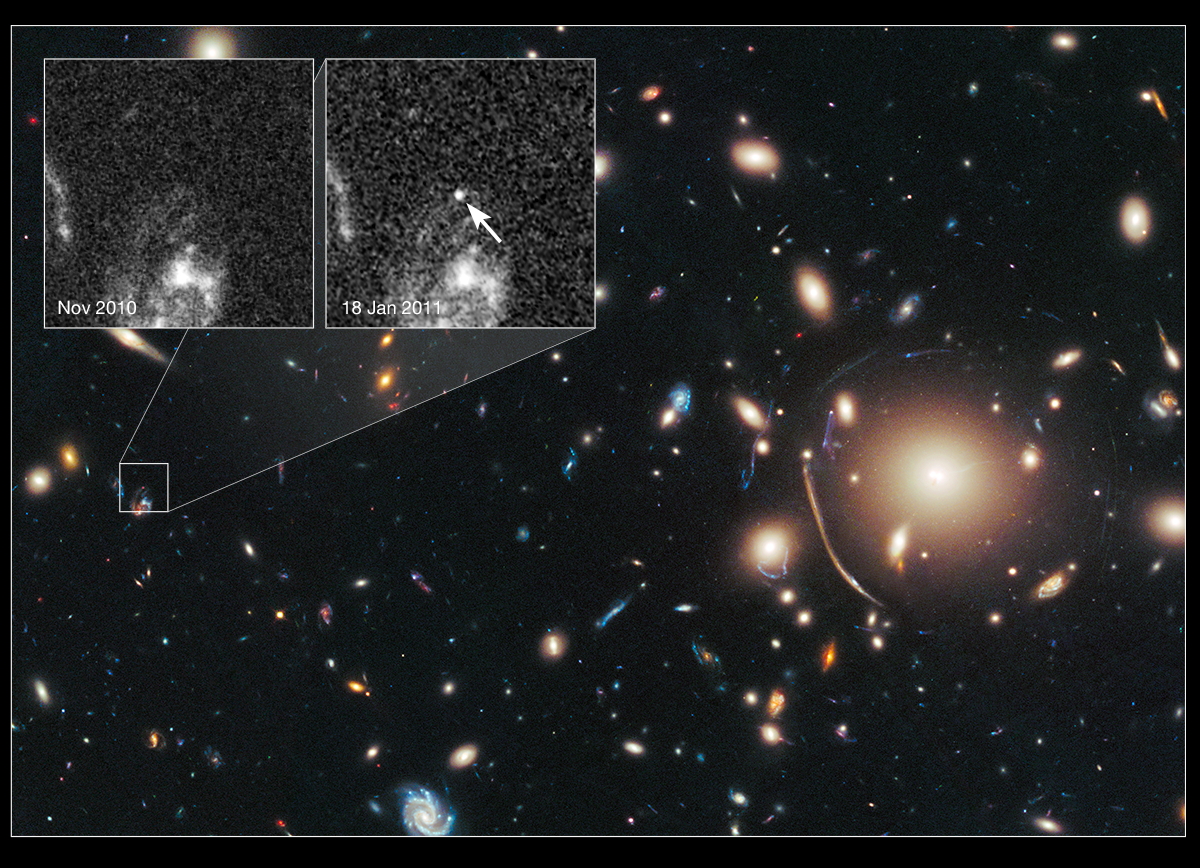

Cosmic lens Abell 383 helps Hubble to find a distant supernova (annotated)

The heart of a vast cluster of galaxies called Abell 383 is shown in this image, taken in visible and near-infrared light by the NASA/ESA Hubble Space Telescope.

The galaxy cluster is so massive that its gravity distorts, brightens, and magnifies light from more distant objects behind it, an effect called gravitational lensing. The small white box at left marks the location of an exploding star called a supernova, located behind the cluster.

An enlarged view of the supernova, nicknamed Tiberius after the first century Roman emperor, is shown in the furthest right inset image, taken in January 2011. The arrow pinpoints the supernova's location. The bright material beneath it is part of the host galaxy. The supernova is seen as it appeared 8 billion years ago.

The inset image on the left, taken in November 2010, shows the same region before the supernova blast.

Both inset images were taken in visible light with Hubble's Advanced Camera for Surveys.

The supernova is one of three exploding stars discovered in the Cluster Lensing And Supernova survey with Hubble (CLASH), and was followed up as part of a Supernova Cosmology Project HST program. CLASH is a Hubble census that probed the distribution of dark matter in 25 galaxy clusters. Dark matter cannot be seen directly but is believed to make up most of the universe's matter.

The image of the galaxy cluster was taken between November 2010 and February 2011 by Hubble's Wide Field Camera 3 and Advanced Camera for Surveys.

Credit: NASA, ESA, C. McCully (Rutgers University), A. Koekemoer (STScI), M. Postman (STScI), A. Riess (STScI/JHU), S. Perlmutter (UC Berkeley, LBNL), J. Nordin (NBNL, UC Berkeley), and D. Rubin (Florida State)